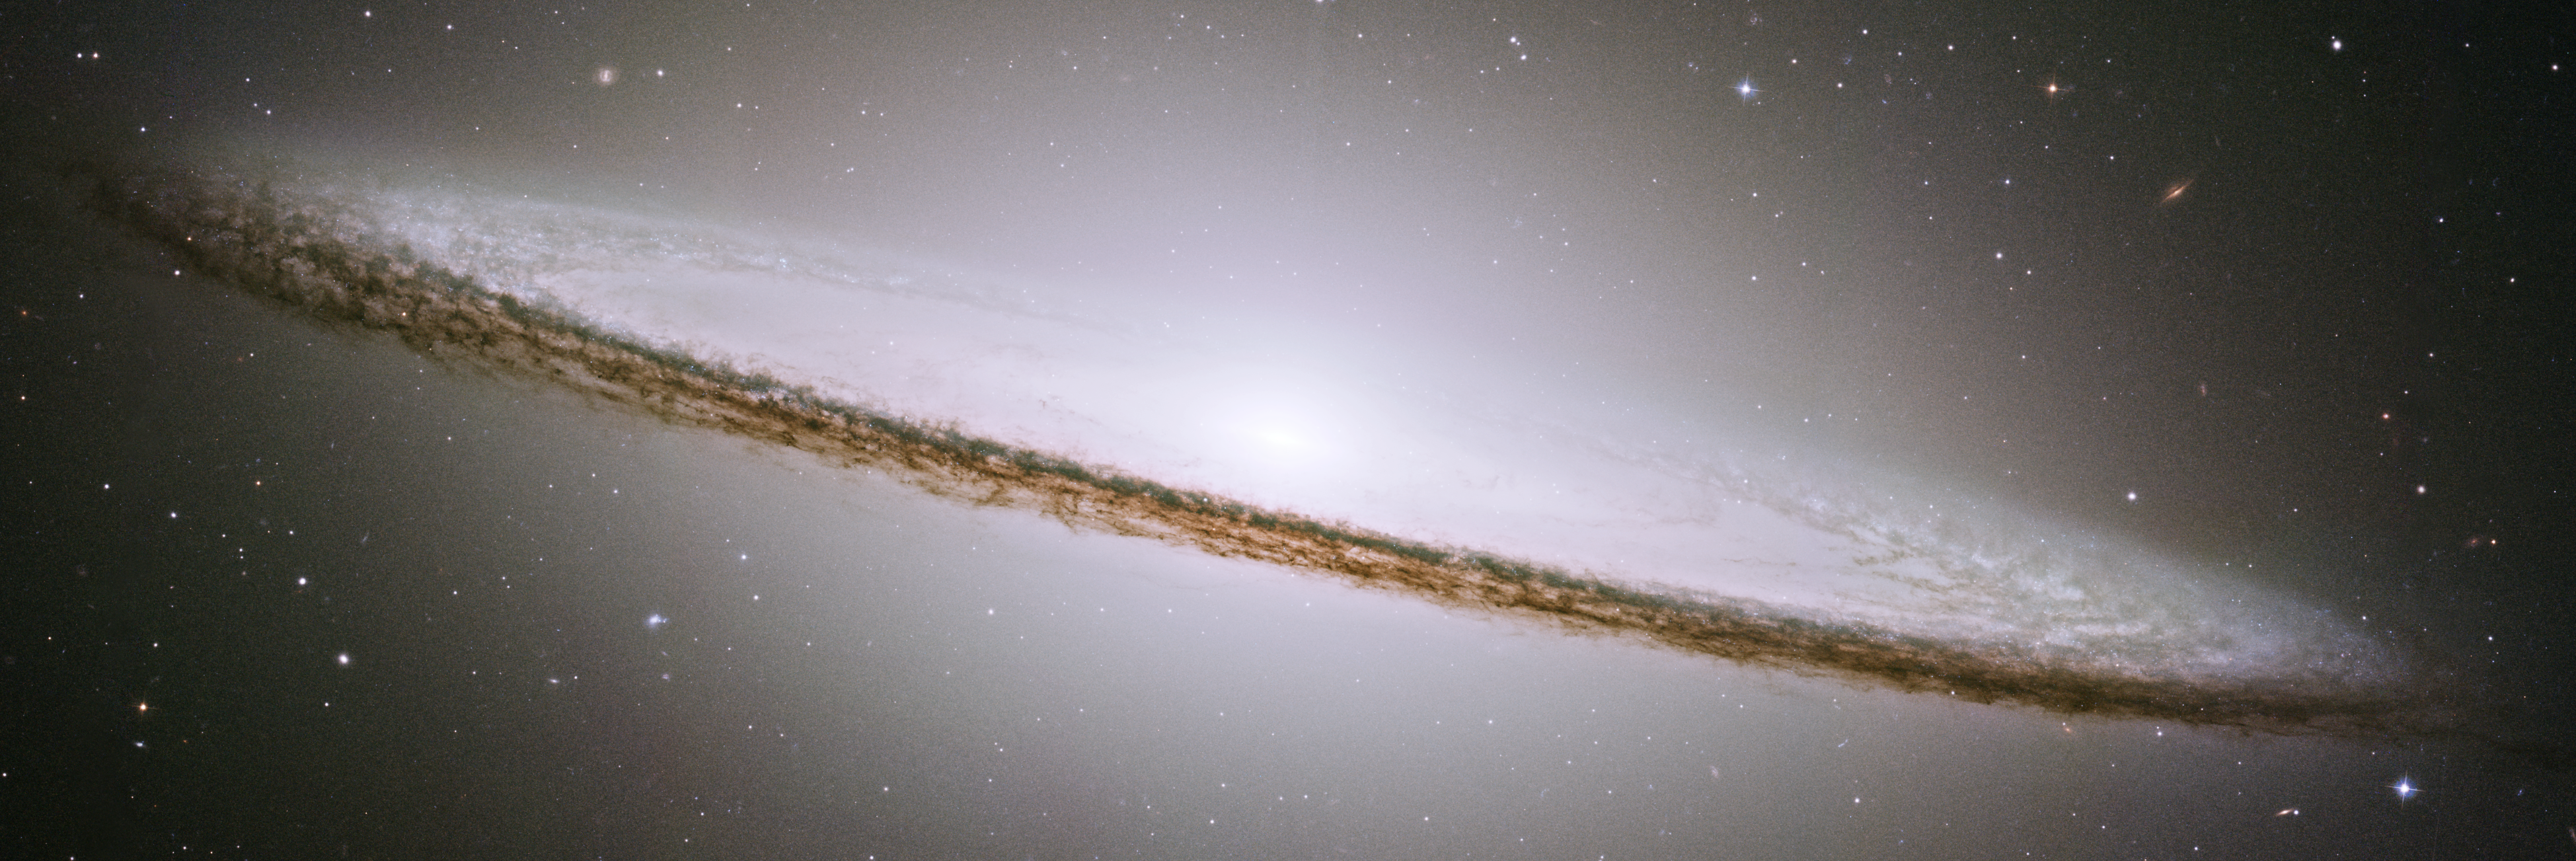

Sombrero galaxy (HST)

This is a mosaic image of the Sombrero galaxy, made with data from Hubble and released in 2004. Learn more about the image here.

See this image side-by-side with Webb's new MIRI image of the galaxy using our slider tool.

Credit: NASA, ESA, CSA, and STScI